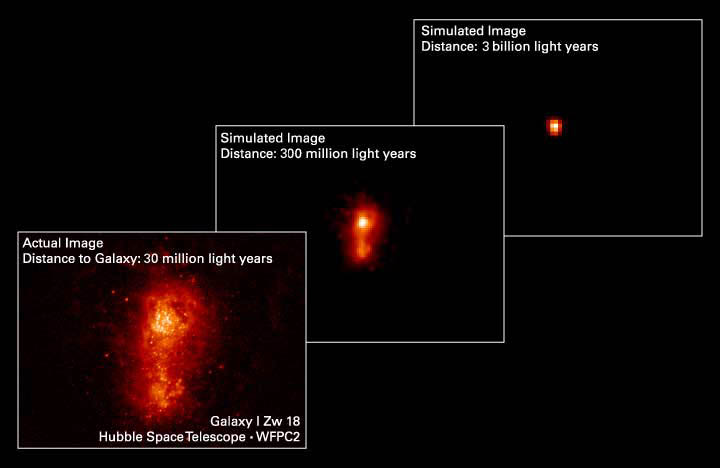

Going, Going, Almost Gone

These three pictures illustrate how a nearby irregular galaxy brimming with star birth would appear at successively greater distances from Earth.

The pictures illustrate that less of the galaxy is seen at successively greater distances from Earth because the fainter stars are no longer visible.

This simulation demonstrates that astronomers may be missing most of the starlight from the farthest galaxies because it's too faint to see, even with the most powerful telescopes. The star birth they are detecting is just the 'tip of the iceberg.'

Credit: Original: D. Hunter (Lowell Observ.) and A. Aloisi (JHU), Simulations: A. Fruchter and Z. Levay (STScI)